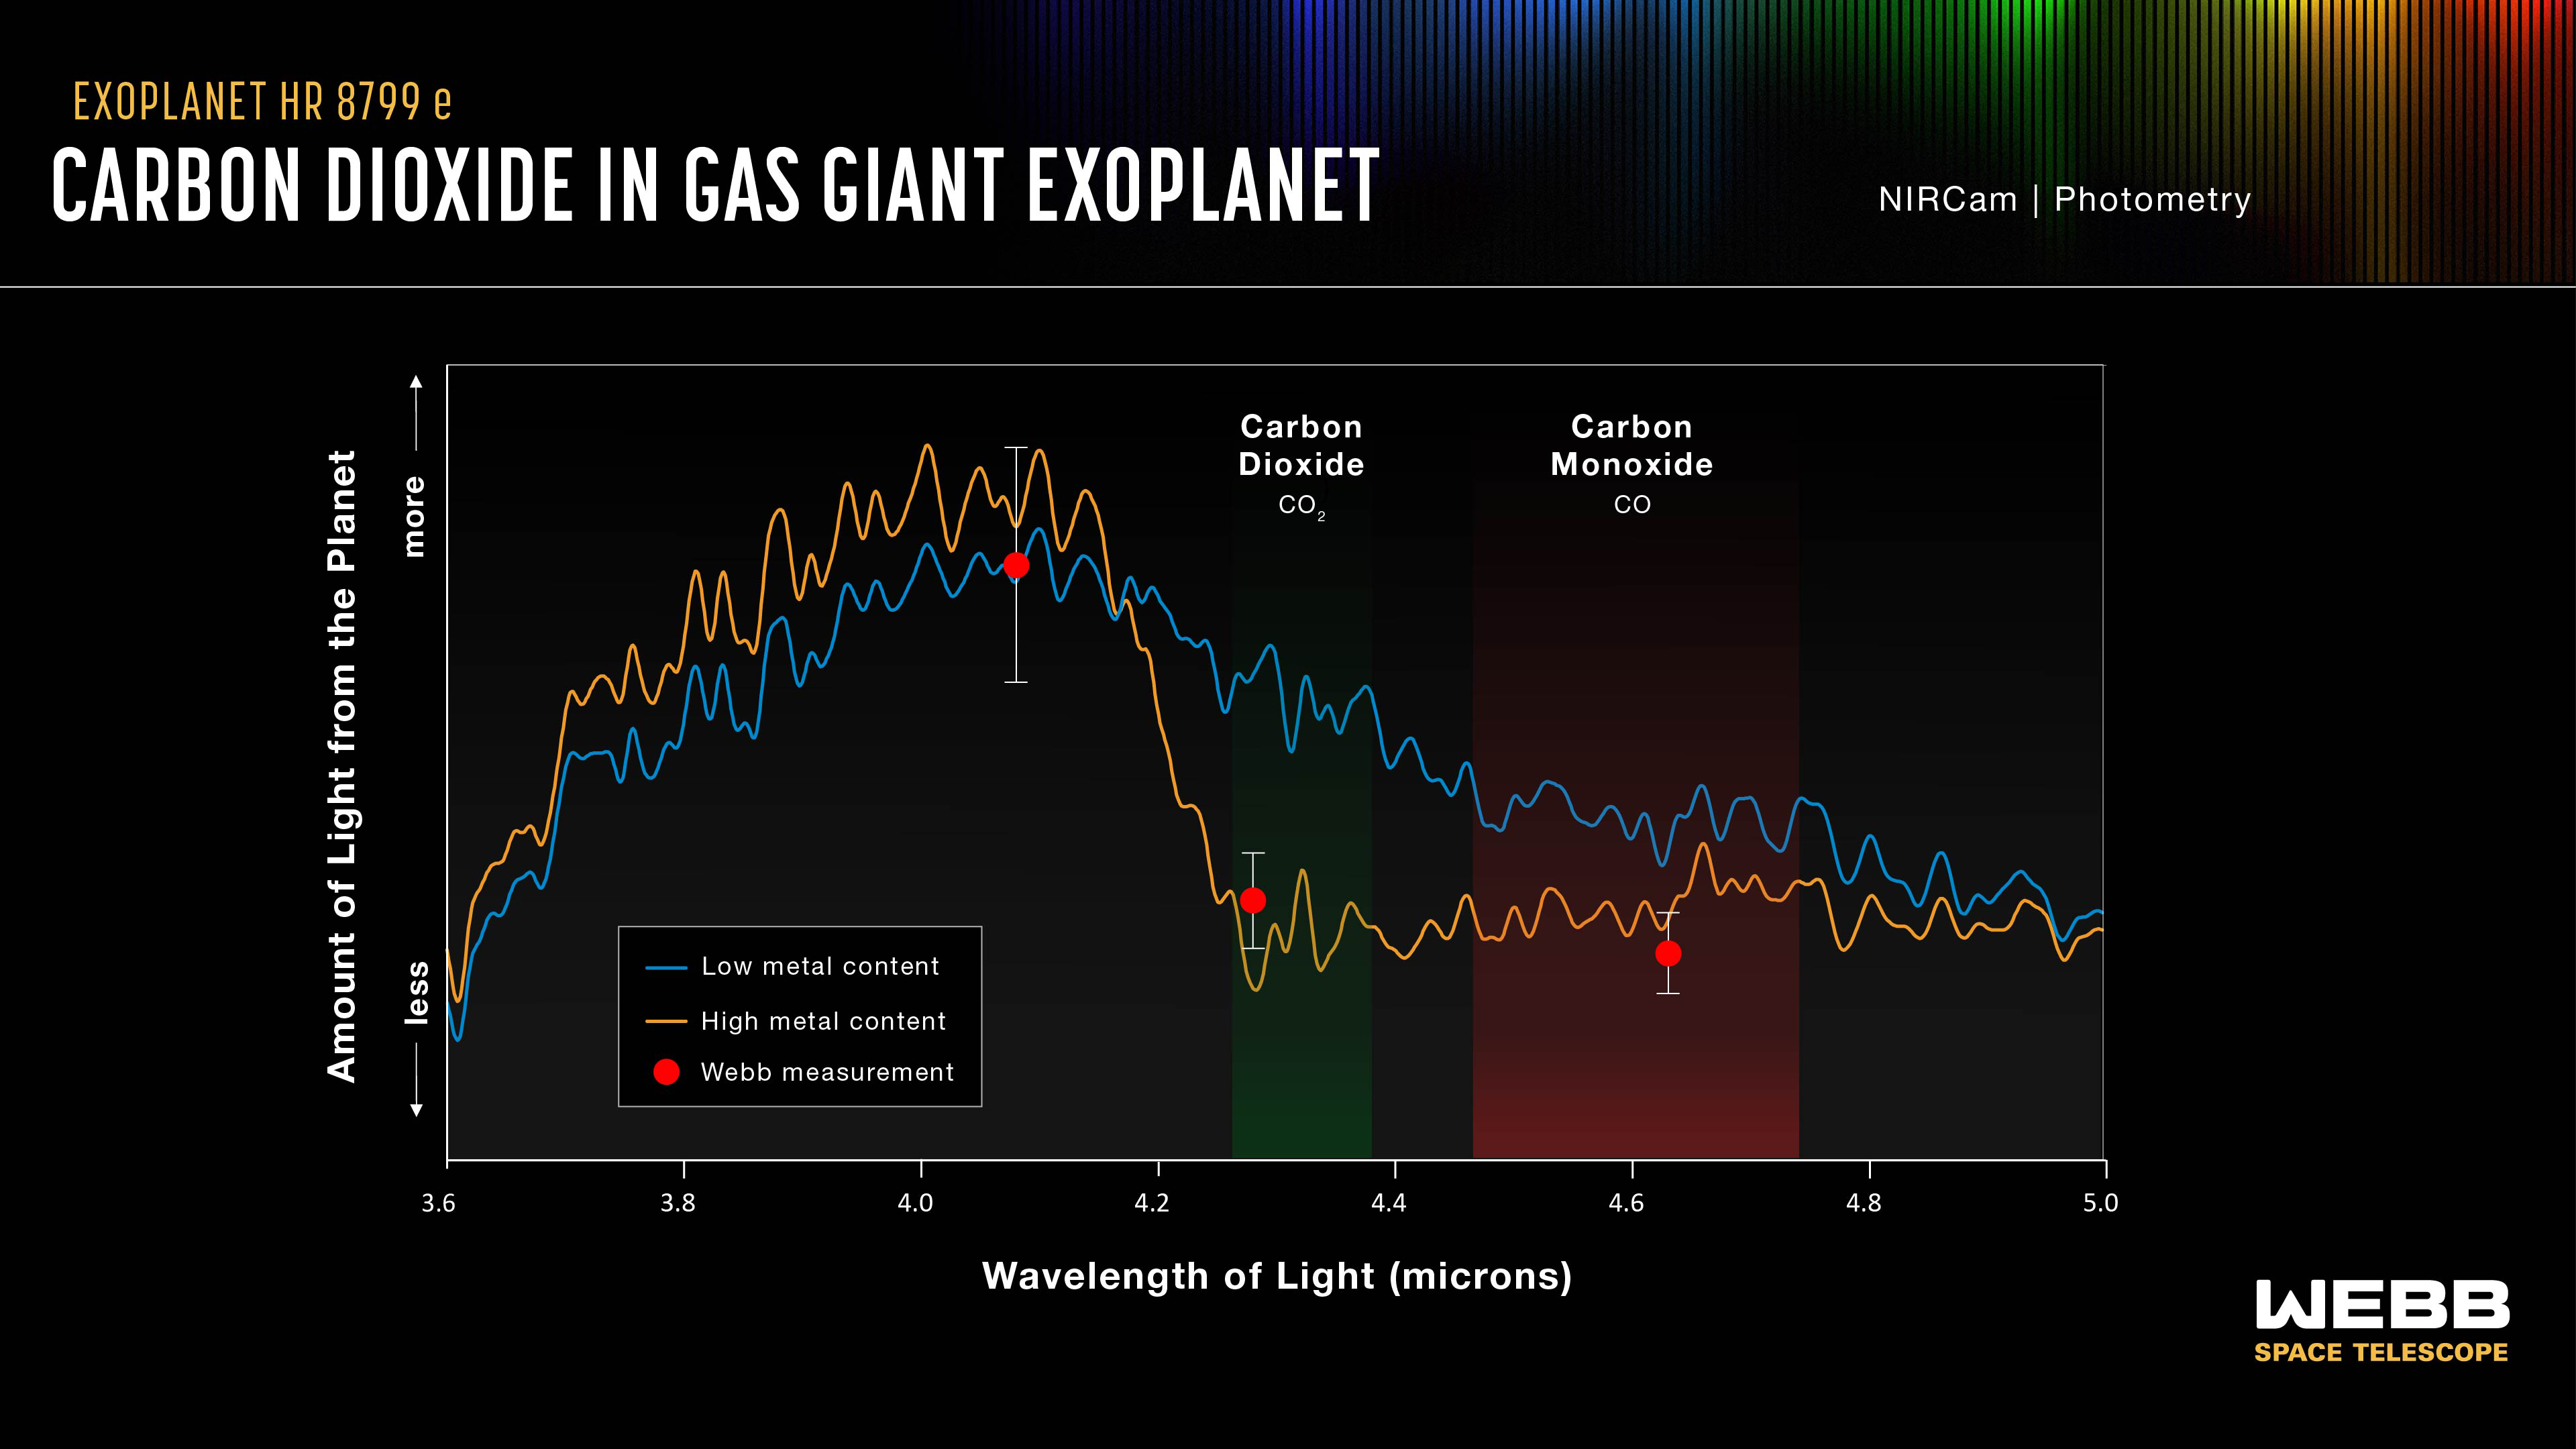

HR 8799 e Spectrum

This graph shows a spectrum of one of the planets in the HR 8799 system, HR 8799 e, which displays the amounts of near-infrared light detected from the planet by Webb at different wavelengths.

The blue and yellow lines are a best-fit model for an atmosphere that would be either low or high in metals heavier than helium, including carbon, also known as metallicity. The Webb data is consistent with a high metallicity planet.

Spectral fingerprints of carbon dioxide and carbon monoxide appear in data collected by Webb’s NIRCam (Near-Infrared Camera).

Credit: NASA, ESA, CSA, STScI, W. Balmer (JHU), L. Pueyo (STScI), M. Perrin (STScI)